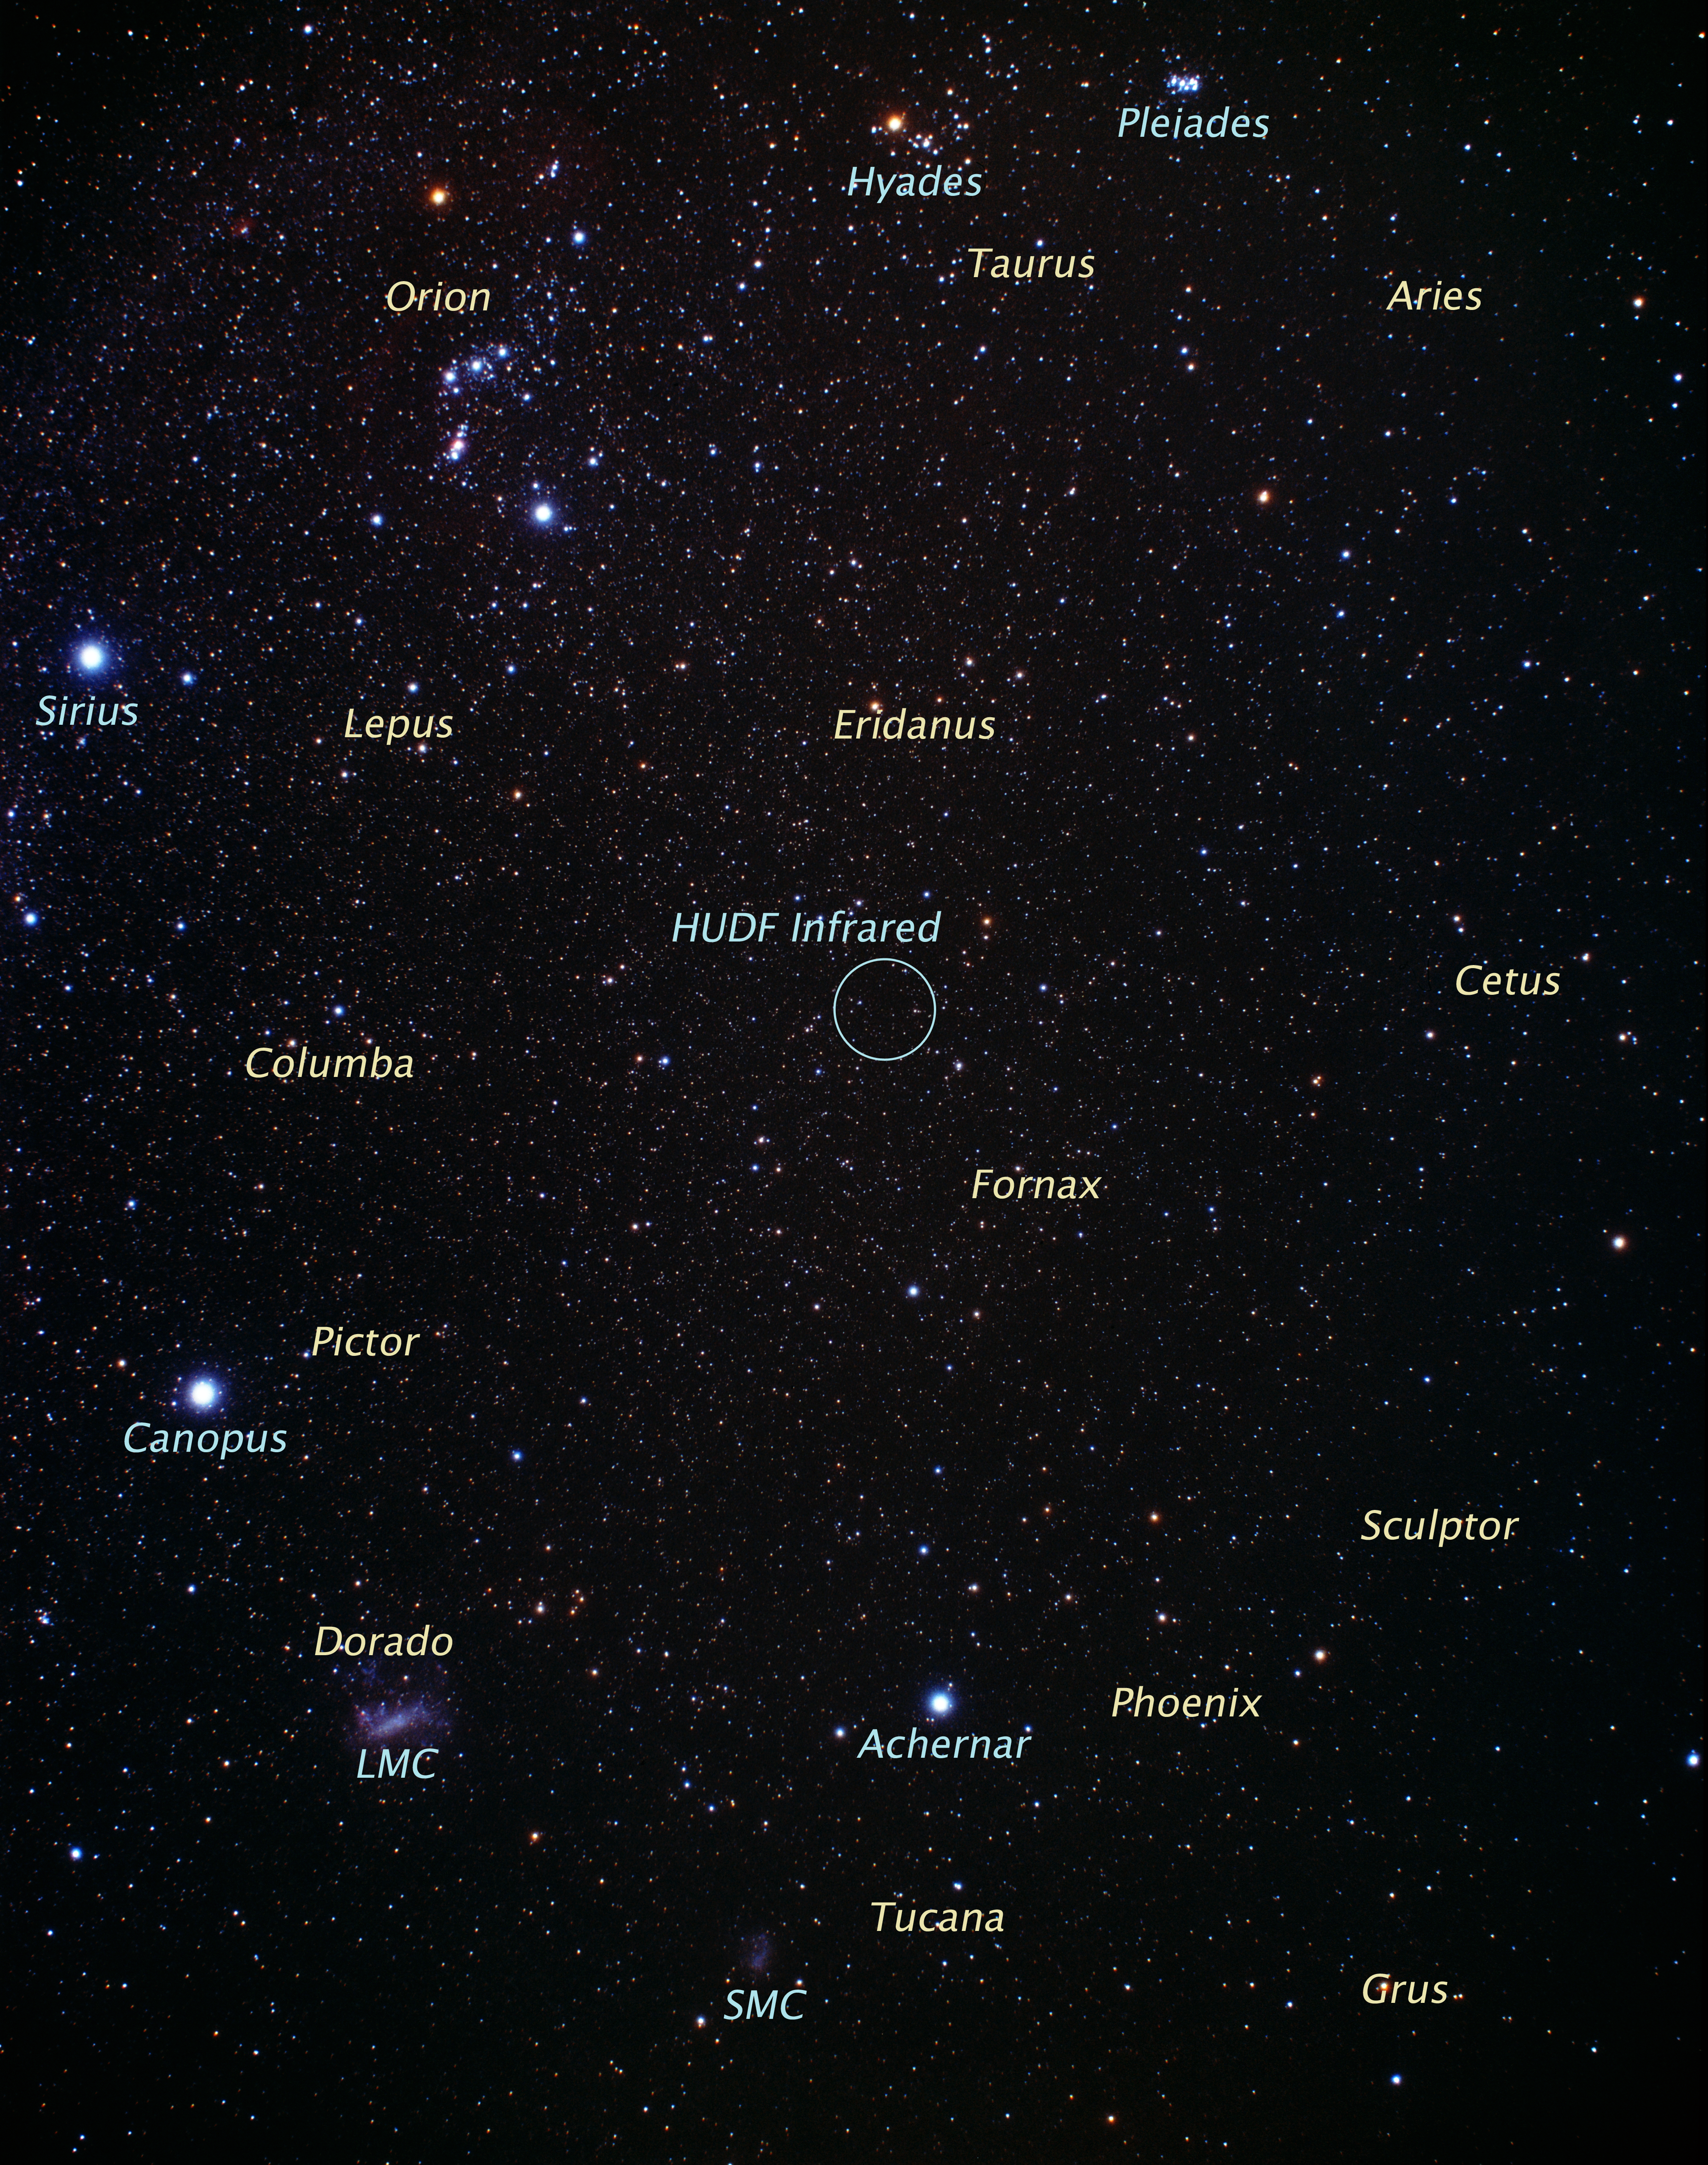

Ground image and the region of sky around the constellation of Fornax (ground-based image)

This picture of the region around the constellation of Fornax, in the southern sky, was taken with a small ground-based camera.

Credit: A. Fujii